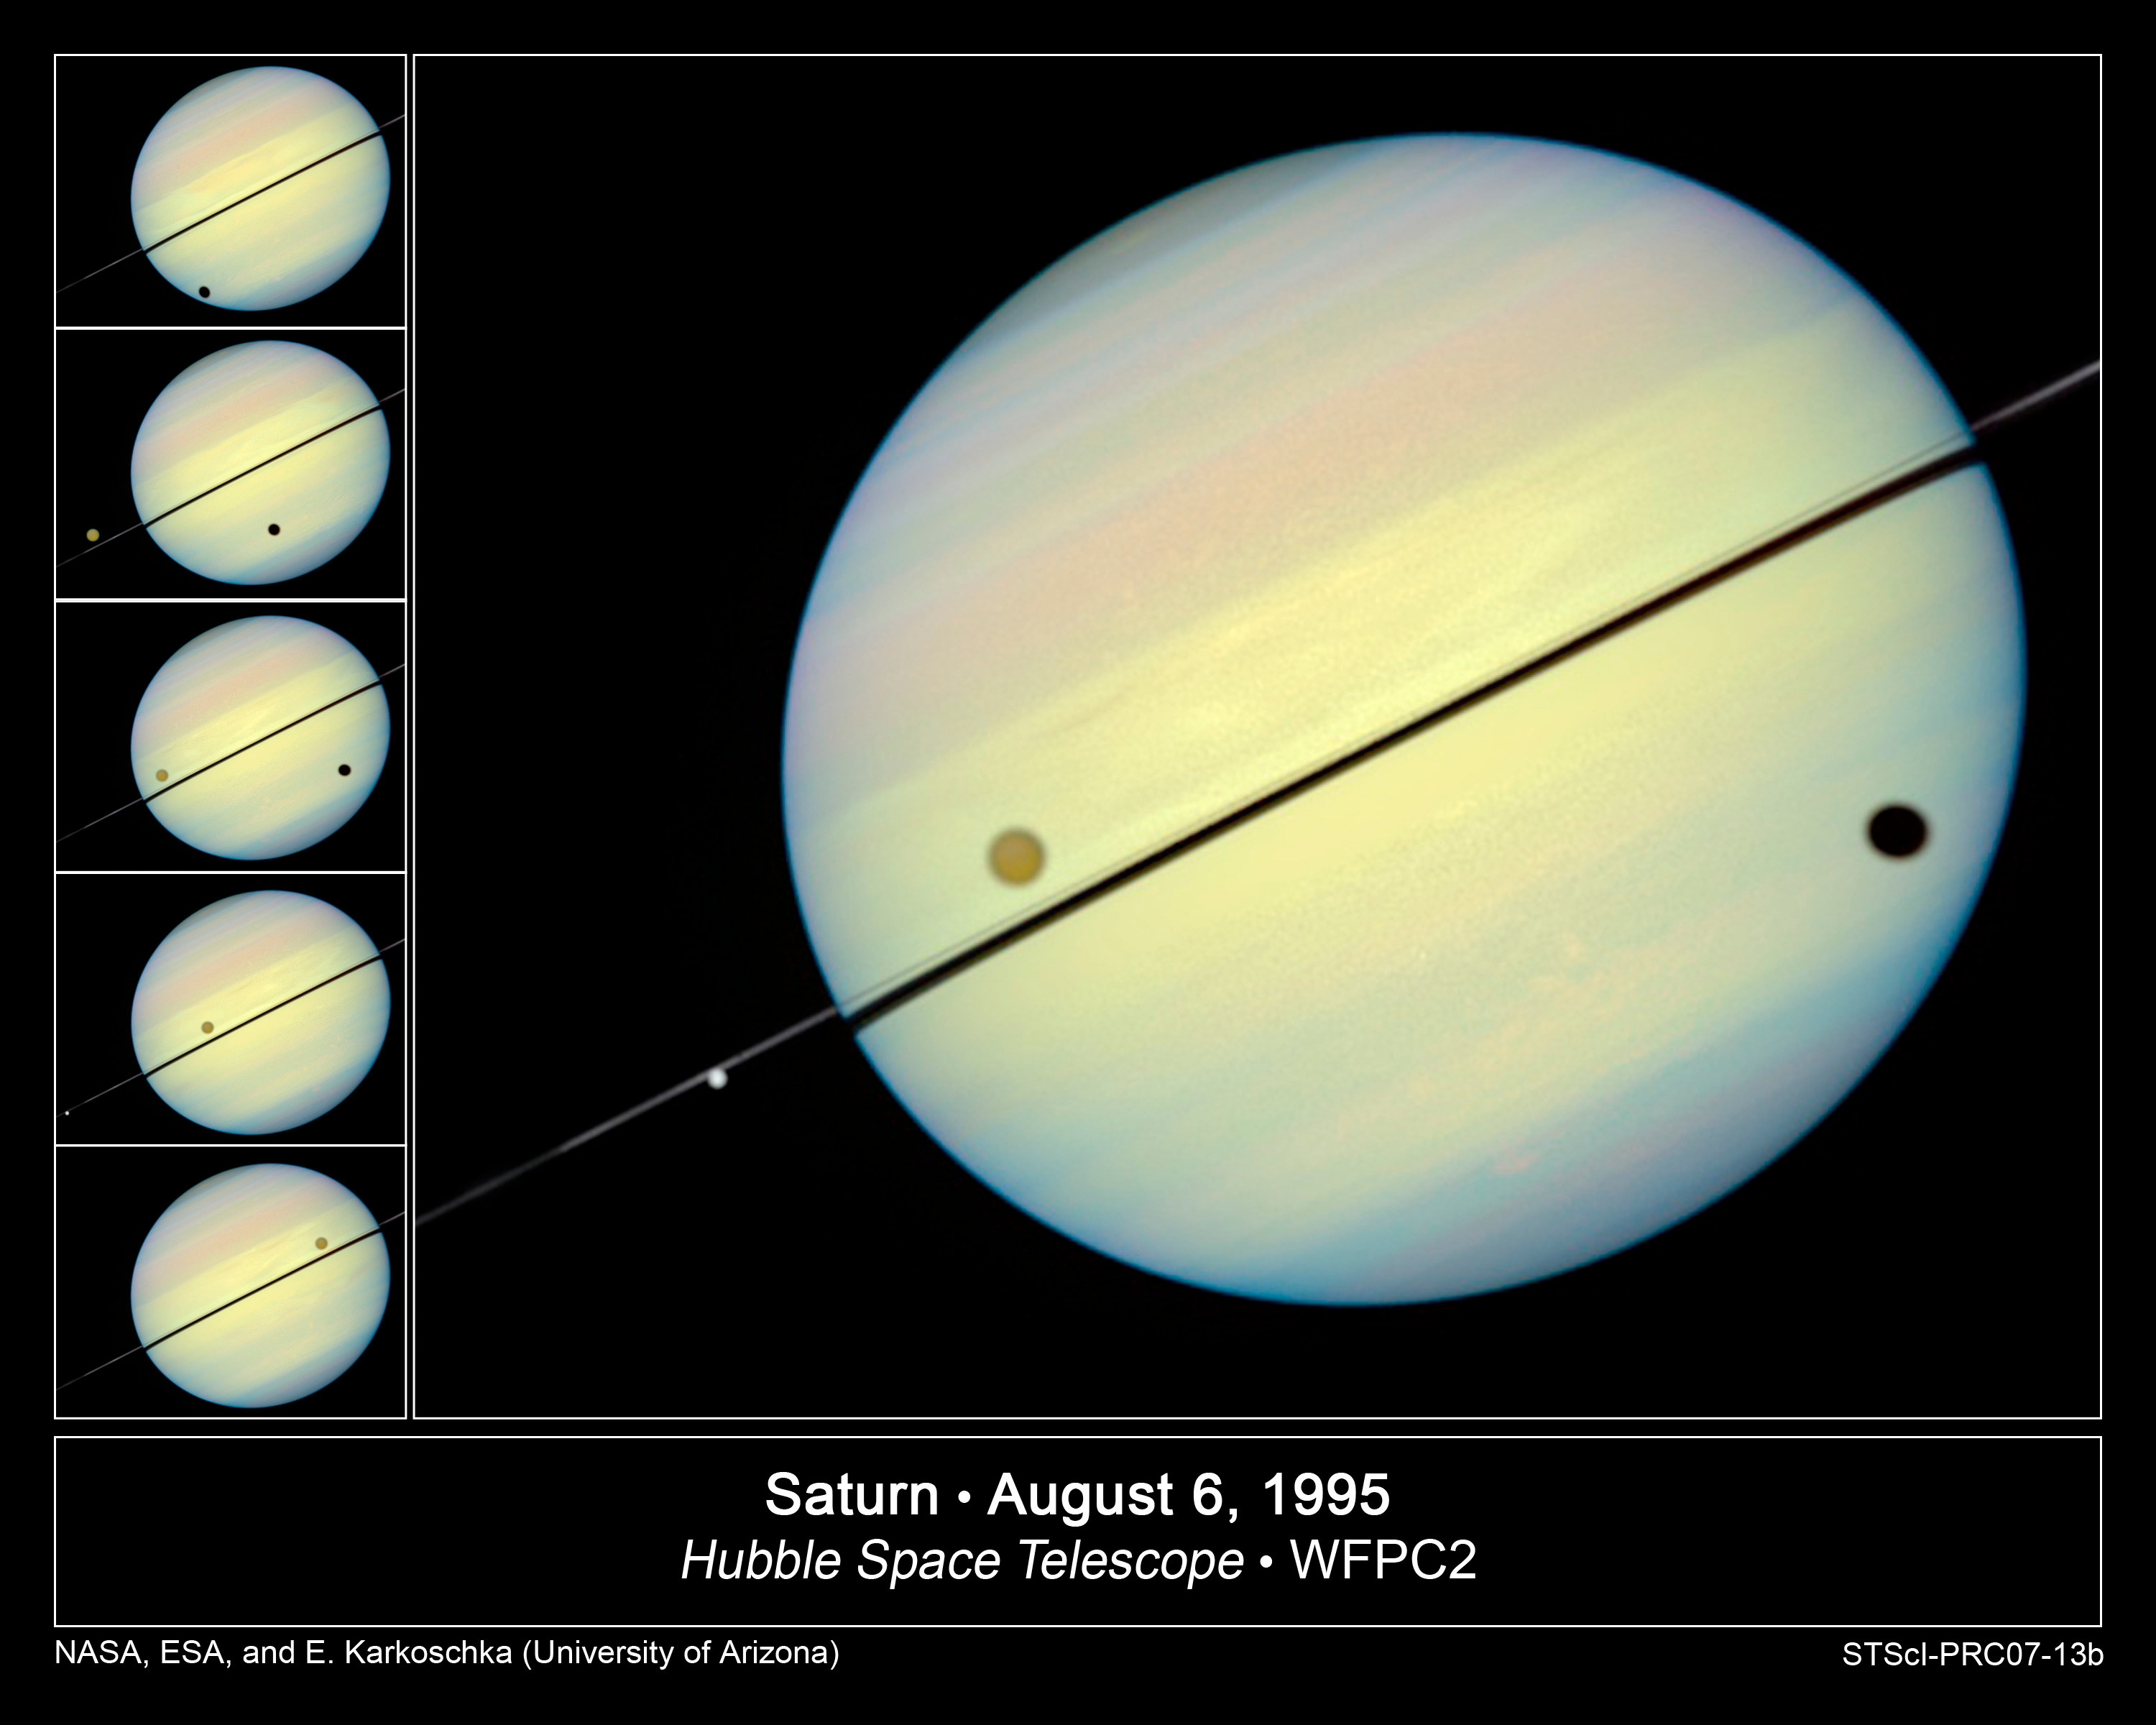

Hubble Catches Titan Chasing Its Shadow

This movie still shows Titan chasing its shadow across Saturn's disk. The still is from a movie created from images taken by NASA/ESA Hubble Space Telescope. It reveals the planet's rings tilted nearly edge-on toward the Earth, an event that occurs once every 15 years.

Credit: NASA/ESA and E. Karkoschka (University of Arizona)